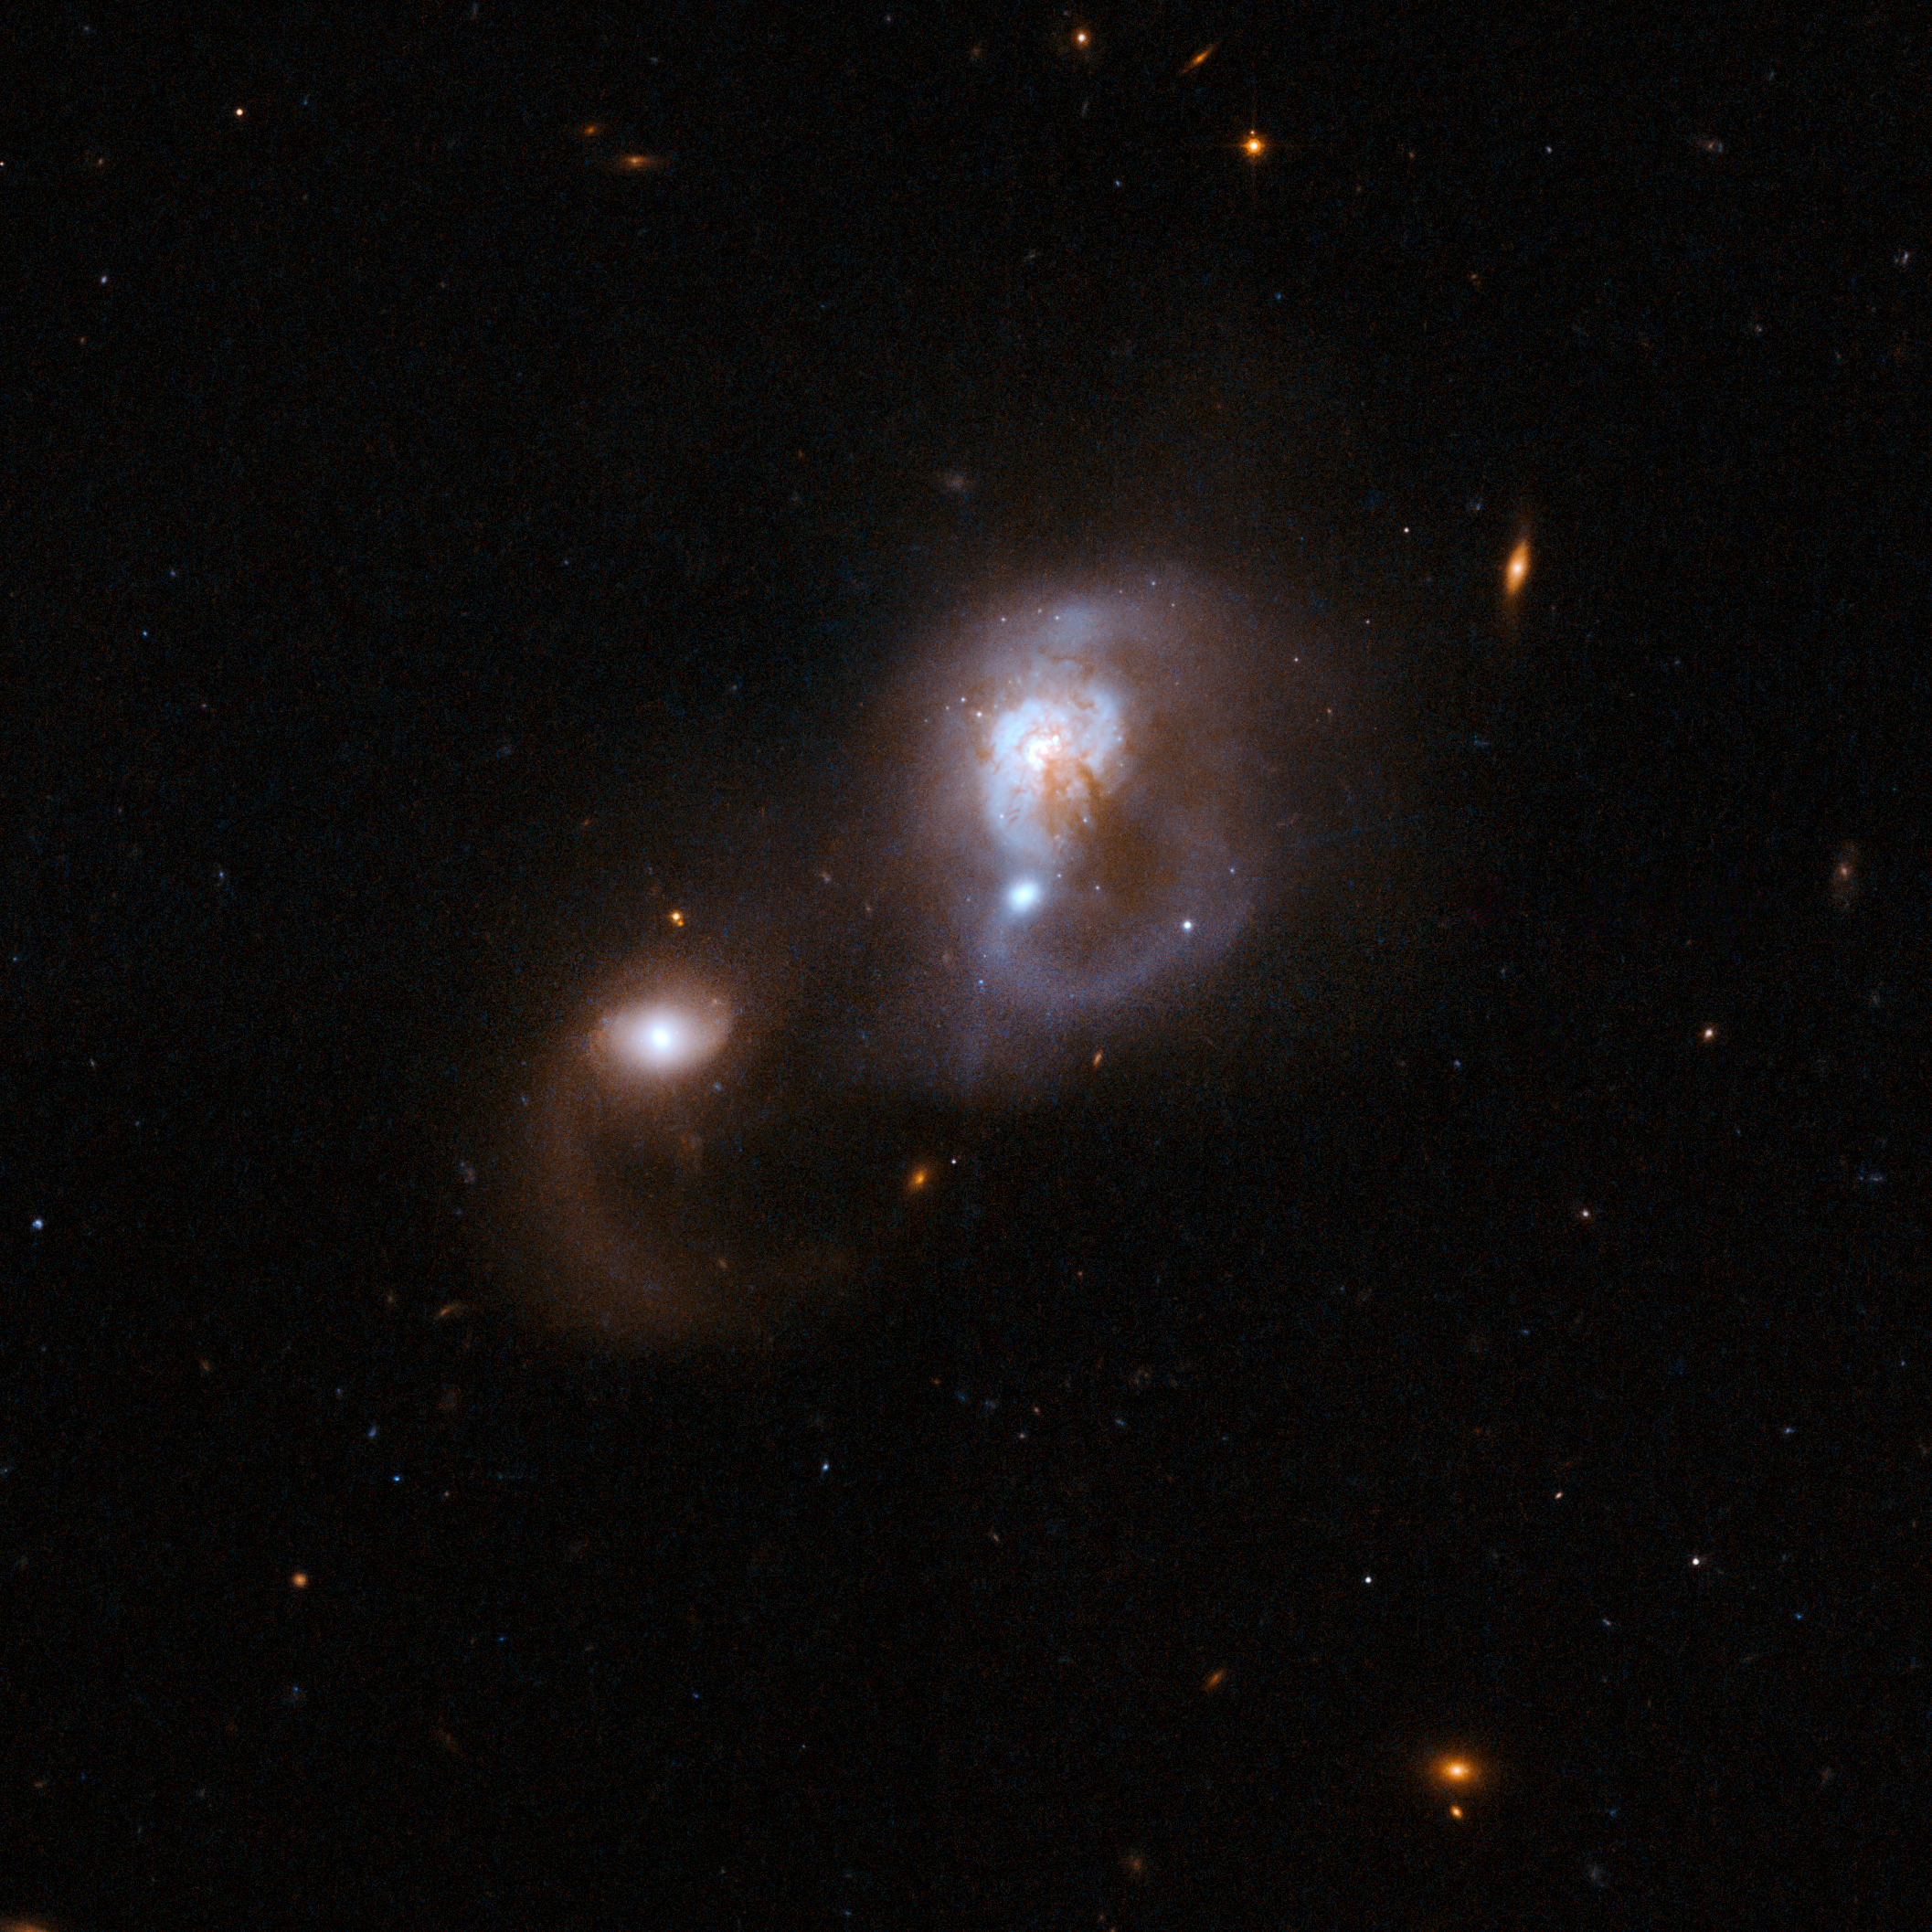

IRAS F10565+2448

IRAS F10565+2448 is a system that appears to consist of two colliding galaxies. The larger galaxy has dust lanes, while the smaller galaxy has a pronounced curved tail that has been pulled away from the centre (downwards as seen here). IRAS F10565+2448 is located in the constellation of Leo, the Lion, about 600 million light-years away.

Some scientists regard this system as a candidate for a three-galaxy system. The nature of the third object is unknown.

This image is part of a large collection of 59 images of merging galaxies taken by the Hubble Space Telescope and released on the occasion of its 18th anniversary on 24th April 2008.

Credit: NASA, ESA, the Hubble Heritage Team (STScI/AURA)-ESA/Hubble Collaboration and A. Evans (University of Virginia, Charlottesville/NRAO/Stony Brook University)